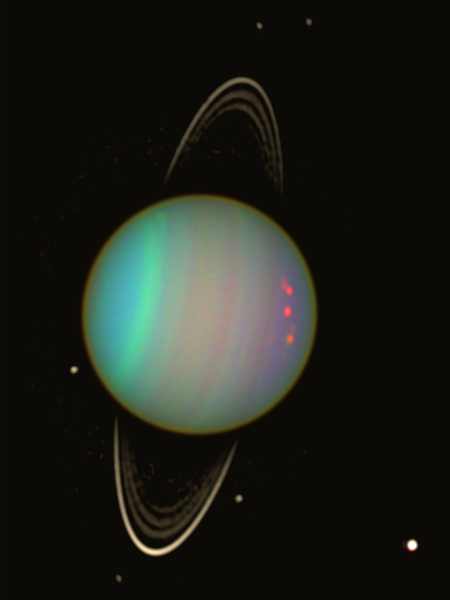

Uranus - Wider View

This wider view of Uranus reveals the planet's faint rings and several of its satellites. The area outside Uranus was enhanced in brightness to reveal the faint rings and satellites. The outermost ring is brighter on the lower side, where it is wider. It is made of dust and small pebbles, which create a thin, dark, and almost vertical line across the right side of Uranus (especially visible on the natural-color image).

The bright satellite on the lower right corner is Ariel, which has a snowy white surface. Five small satellites with dark surfaces can be seen just outside the rings. Clockwise from the top, they are: Desdemona, Belinda, Portia, Cressida, and Puck. Even fainter satellites were imaged in deeper exposures, also taken with the Advanced Camera in August 2003.

Credit: NASA/ESA and Erich Karkoschka, University of Arizona